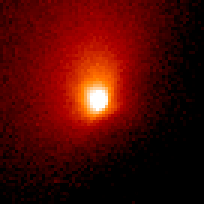

Comet Hale-Bopp

This is a series of Hubble Space Telescope observations of the region around the nucleus of Hale-Bopp, taken on eight different dates since September 1995. They chronicle changes in the evolution of the nucleus as it moves ever closer to, and is warmed by, the sun.

Credit: Harold Weaver (Johns Hopkins University) and NASA/ESA